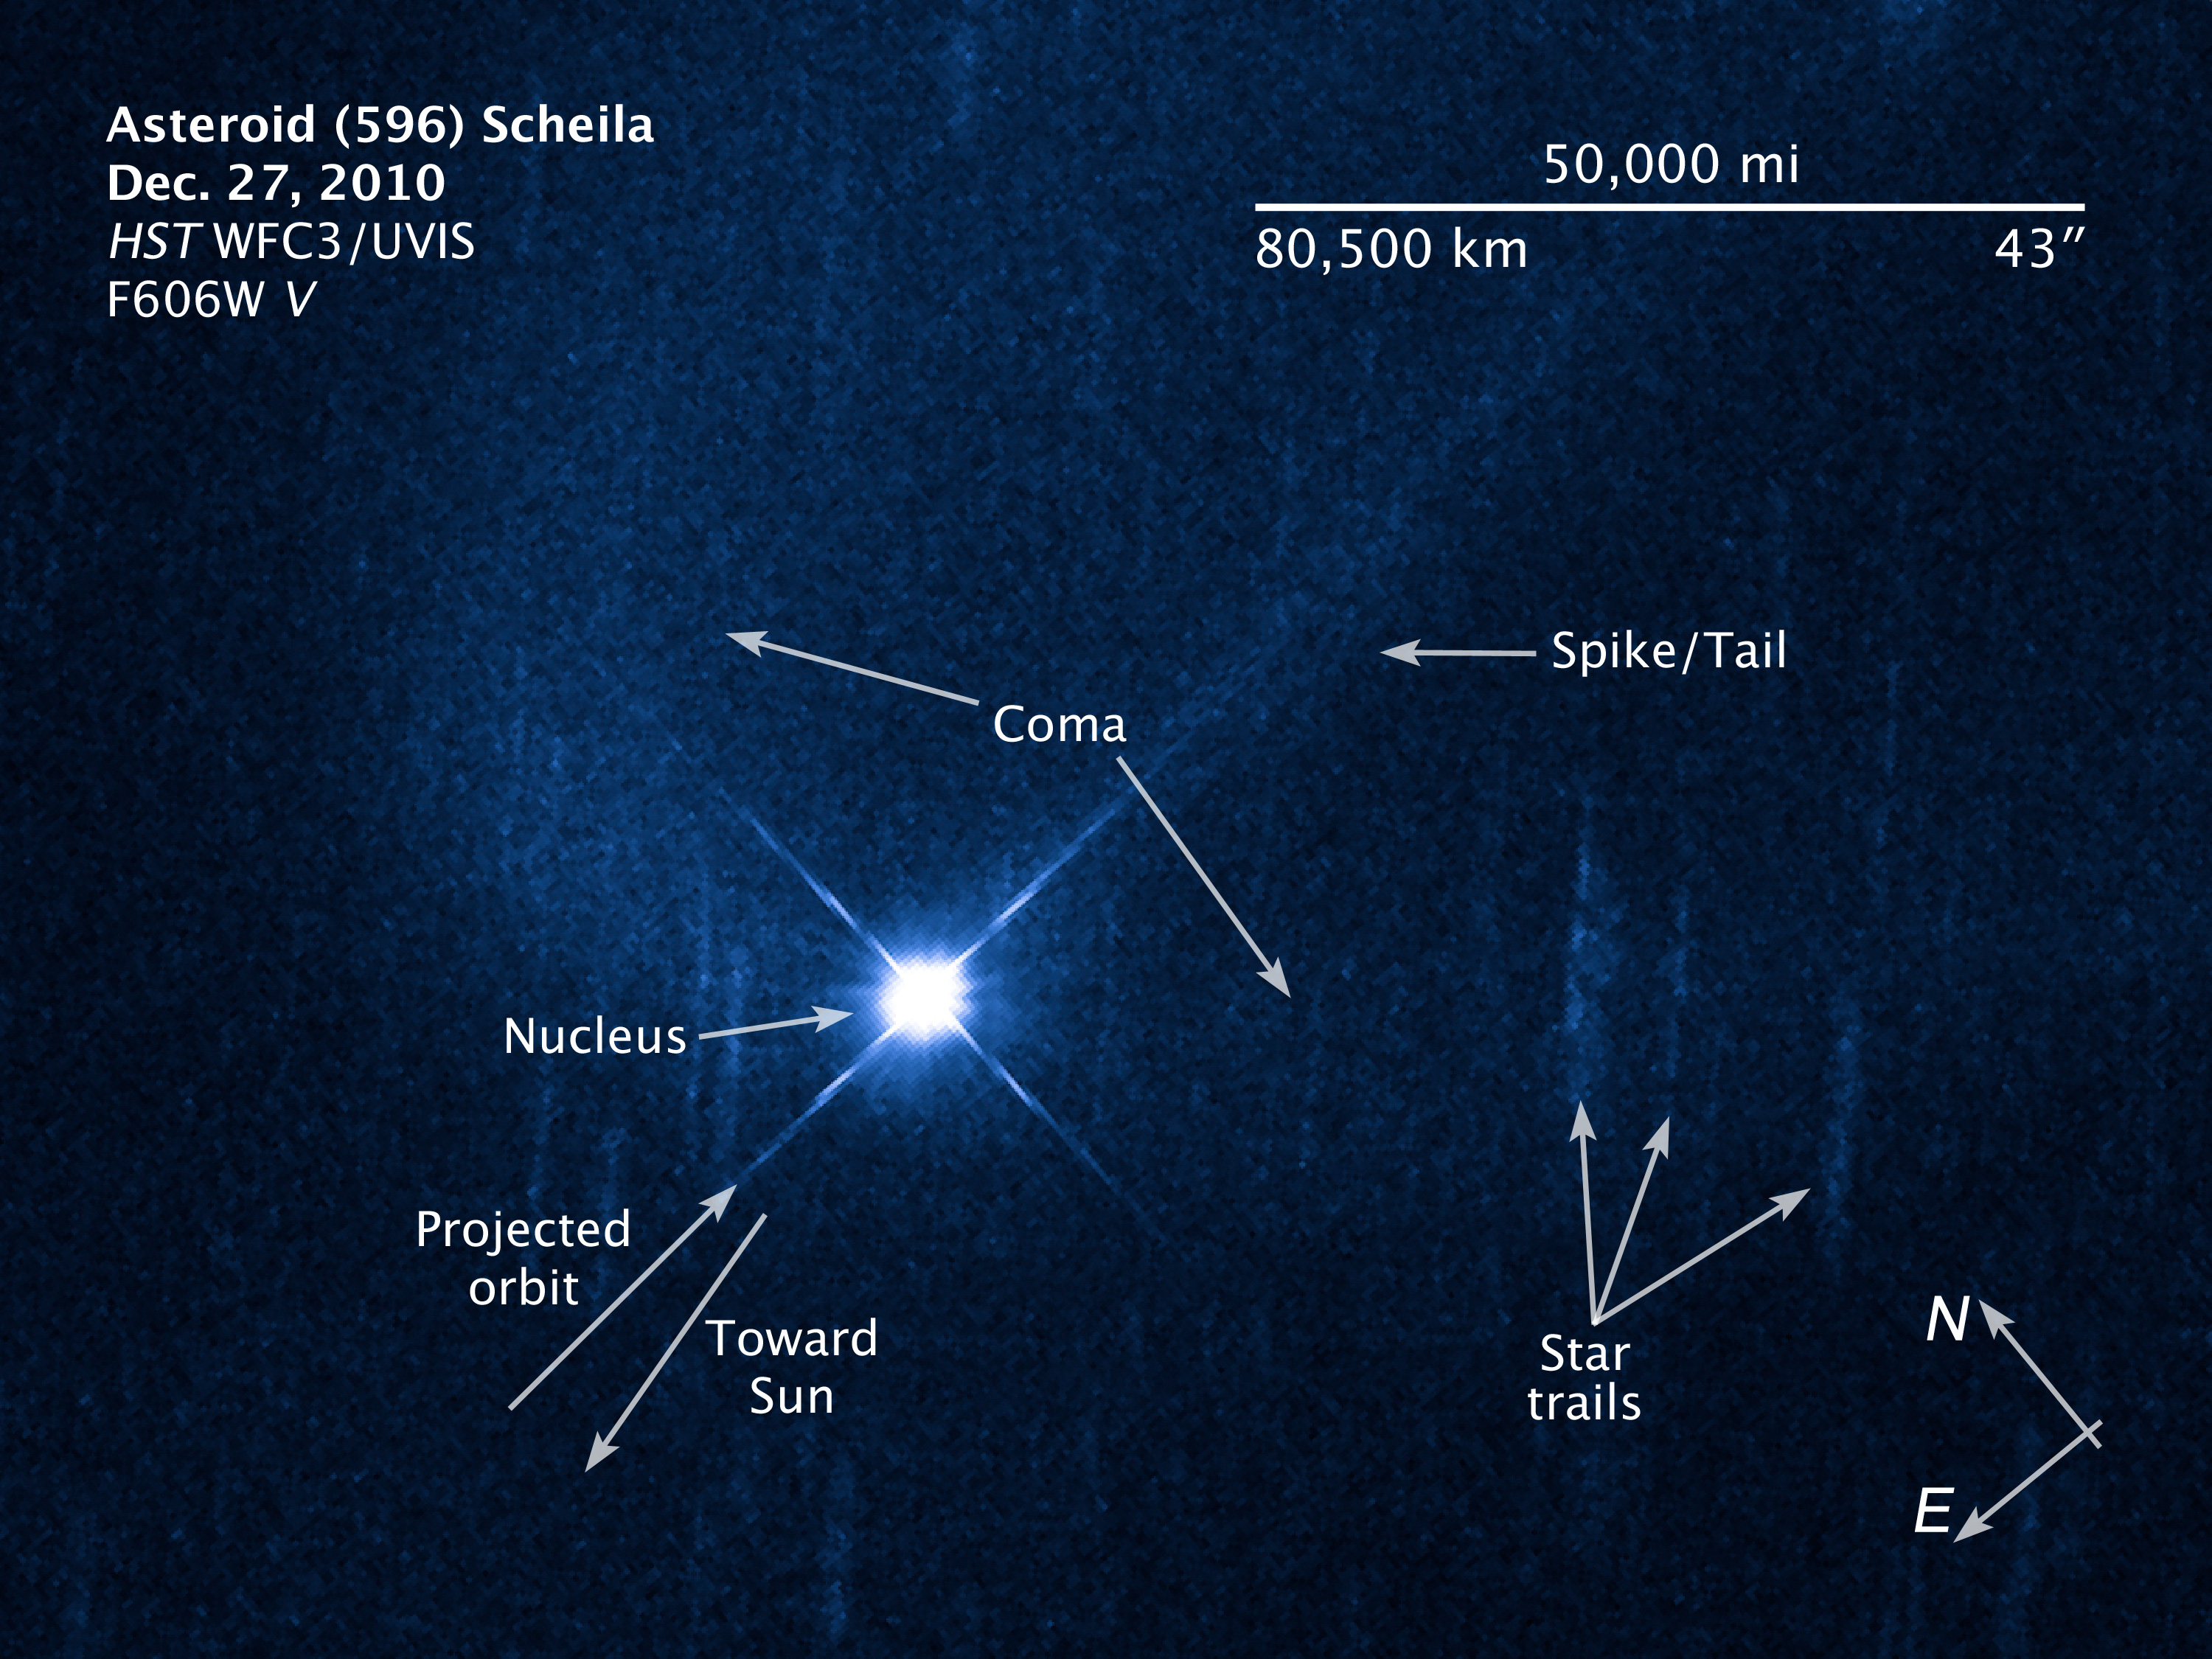

Annotated illustration and compass image of asteroid (596) Scheila

Annotated illustration and compass image of asteroid (596) Scheila.

Credit: NASA, ESA and Z. Levay (STScI). Science Credit: NASA, ESA and D. Jewett (UCLA, USA)